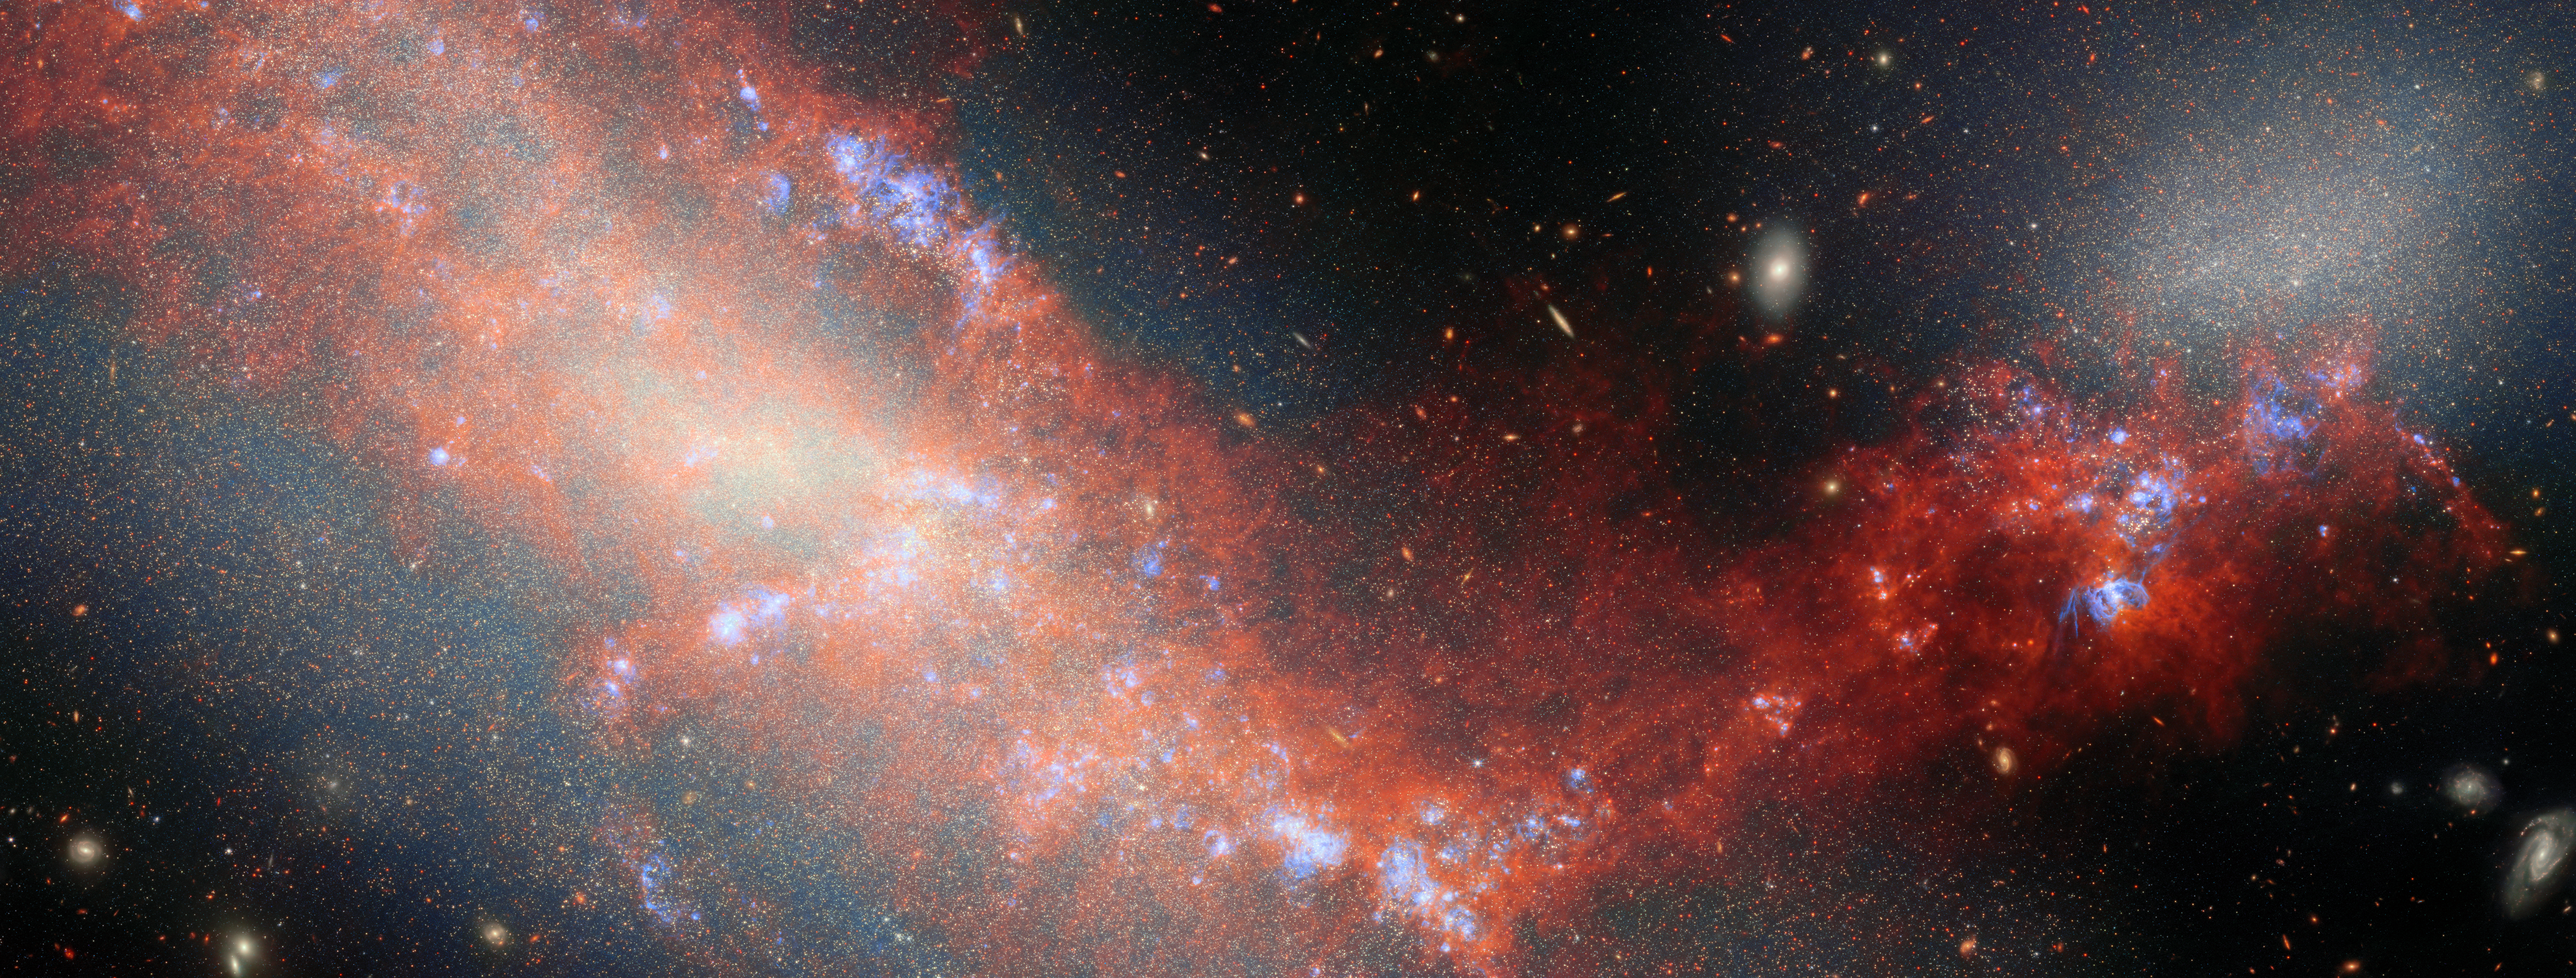

A dance of dwarf galaxies

For this new ESA/Webb Picture of the Month, the NASA/ESA/CSA James Webb Space Telescope has spied a pair of dwarf galaxies engaged in a gravitational dance. These two galaxies are named NGC 4490 and NGC 4485, and they’re located about 24 million light-years away in the constellation Canes Venatici (The Hunting Dogs). Aside from the Milky Way’s own dwarf companions (the Large and Small Magellanic Clouds), this is the closest known interacting dwarf-dwarf system where astronomers have directly observed both a gas bridge and resolved stellar populations. Together NGC 4490 and NGC 4485 form the system Arp 269, which is featured in the Atlas of Peculiar Galaxies. At such a close distance (and with Webb’s impressive ability to peer through dusty cosmic clouds) these galaxies allow astronomers to witness up close the kinds of galaxy interactions that were common billions of years ago.

Dwarf galaxies likely share many similarities with young galaxies in the early Universe: they are much less massive than galaxies like the Milky Way, they typically have small amounts of metals (what astronomers call elements heavier than helium), and they contain a lot of gas and relatively few stars. When nearby dwarf galaxies collide, merge, or steal gas from one another, it can tell us how galaxies billions of years ago might have grown and evolved.

The nearby dwarf galaxies NGC 4490 and NGC 4485 form an intriguing pair. Nearly three decades ago, astronomers discovered a wispy bridge of gas connecting the two galaxies, showing that they have interacted in the past. Despite many studies with powerful telescopes like the NASA/ESA Hubble Space Telescope, the history between NGC4490 and NGC 4485 has remained mysterious.

Recently, Webb observed this curious galactic pair as part of the Feedback in Emerging extrAgalactic Star clusTers (FEAST) programme (#1783; PI: A. Adamo). The FEAST programme used Webb’s sensitive infrared eyes to reveal the formation of new stars in different types of nearby galaxies.

This image was developed using data from Webb’s Near-InfraRed Camera (NIRCam) and Mid-InfraRed Instrument (MIRI), as well as a single narrow-band filter from Hubble (657N). It reveals NGC 4490 and NGC 4485 in never-before-seen detail and illuminates the bridge of gas and stars that connects them. NGC 4490 dominates the image as the larger object occupying the left side of the image, while NGC 4485 is the smaller galaxy that hosts the top-right portion of the image. By dissecting these galaxies star by star, researchers were able to map out where young, middle-aged, and old stars reside, and trace the timeline of the galaxies’ interaction.

Roughly 200 million years ago, these galaxies whirled close to one another before waltzing away. The larger galaxy, NGC 4490, ensnared a stream of gas from its companion, and this gas now trails between the galaxies like dancers connected by outstretched arms. Along the newly formed bridge of gas and within the two galaxies, this interaction spurred a burst of new stars. The concentrated areas of bright blue that appear throughout the field indicate highly ionised regions of gas by the recently formed star clusters. Just 30 million years ago, these galaxies burst alight with stars once more, with new clusters coalescing where the gas of the two galaxies mixed together.

By capturing the history of the galactic dancers NGC 4490 and NGC 4485, Webb has revealed new details in how dwarf galaxies interact, giving us a glimpse of how small galaxies near and far grow and evolve.

Credit: ESA/Webb, NASA & CSA, A. Adamo (Stockholm University), G. Bortolini, and the FEAST JWST team